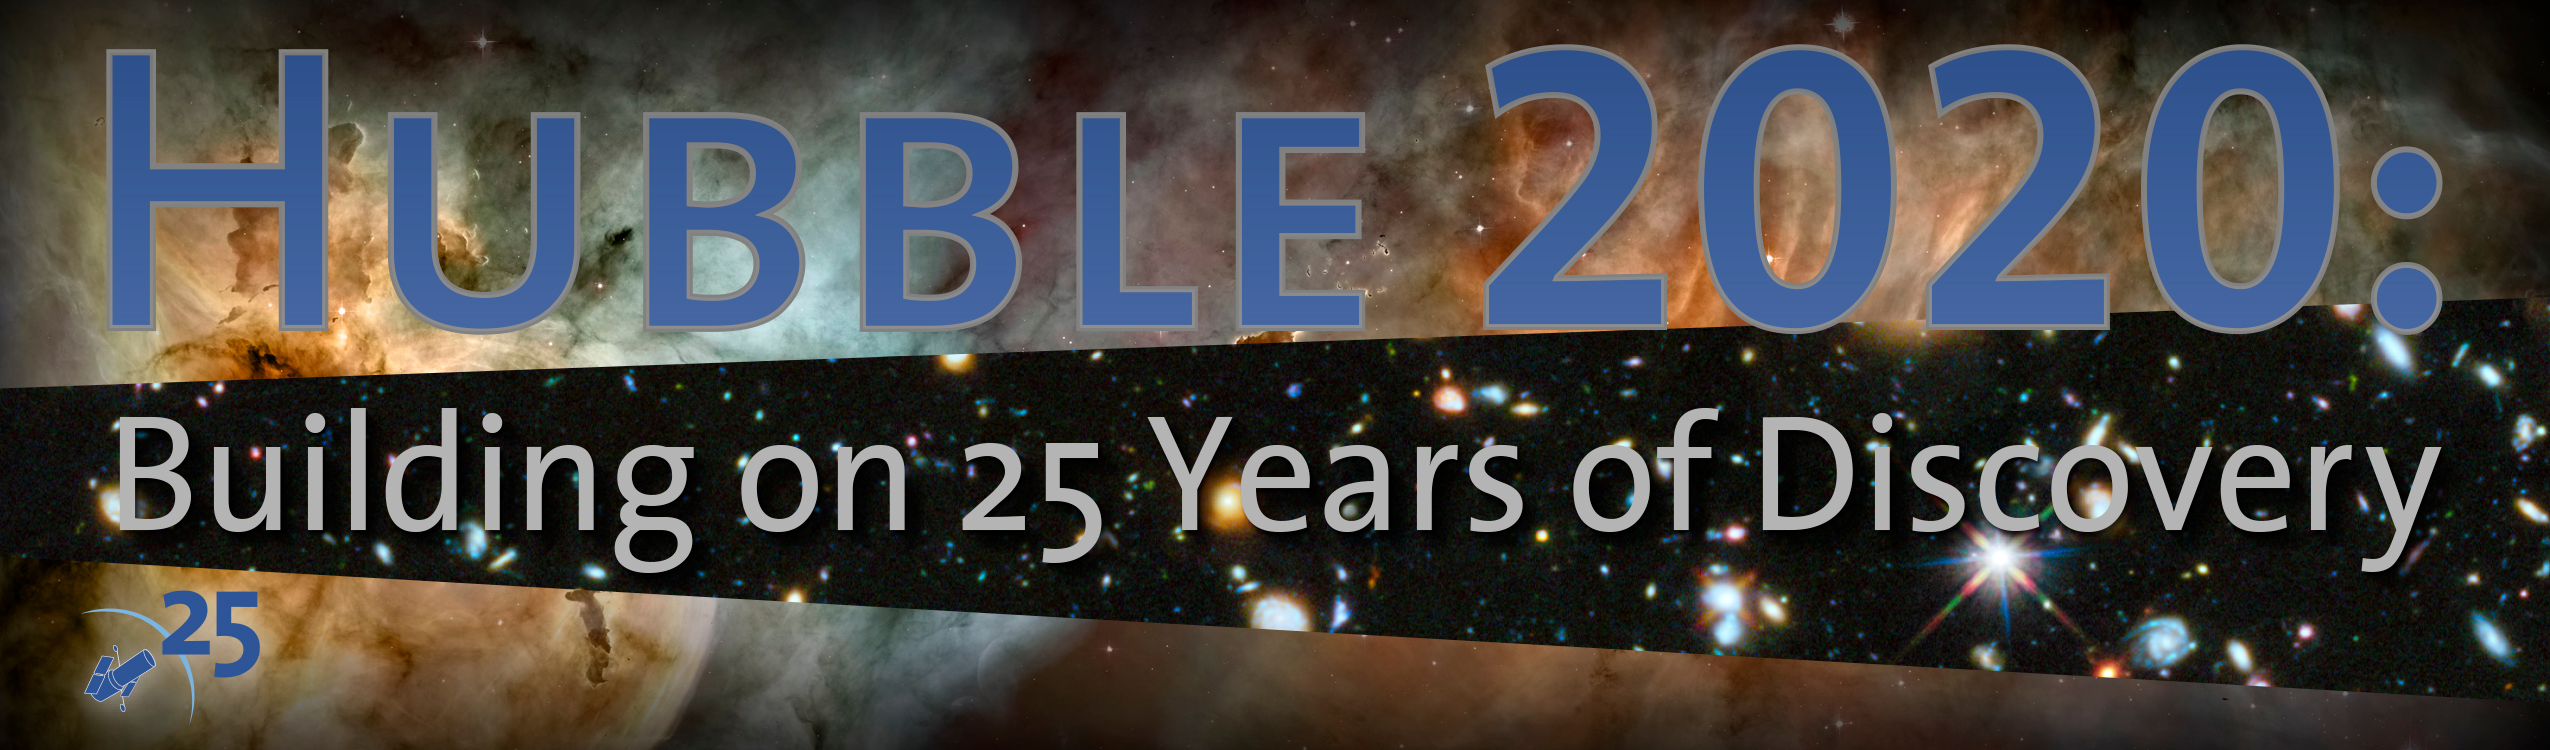

Hubble 2020: building on 25 years of discovery

This poster advertises the symposium "Hubble 2020: Building on 25 years of Discovery" which will mark the 25th anniversary of the launch of the Hubble Space Telescope. This symposium will be held at Space Telescope Science Institute (STScI) in Baltimore on 20–23 April 2015.

Credit: NASA, ESA and STScI